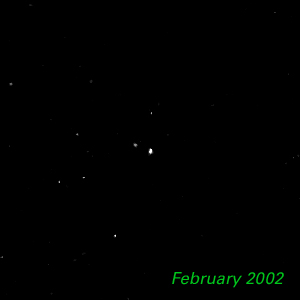

February 2002 - 1998 WW31

The Hubble Space Telescope is hot on the trail of a puzzling new class of solar system object that might be called a Pluto "mini-me." Together, these objects are 5,000 times less massive than Pluto and Charon. Like Pluto and Charon, these dim and fleeting objects travel in pairs in the frigid, mysterious outer realm of the solar system called the Kuiper Belt, a long-hypothesized "junkyard" of countless icy bodies left over from the solar system's formation. A total of seven binary Kuiper Belt objects have been seen so far by Hubble and ground-based observatories. Among them is a pair called 1998 WW31, which the Hubble telescope studied in detail.

Credit: NASA & ESA